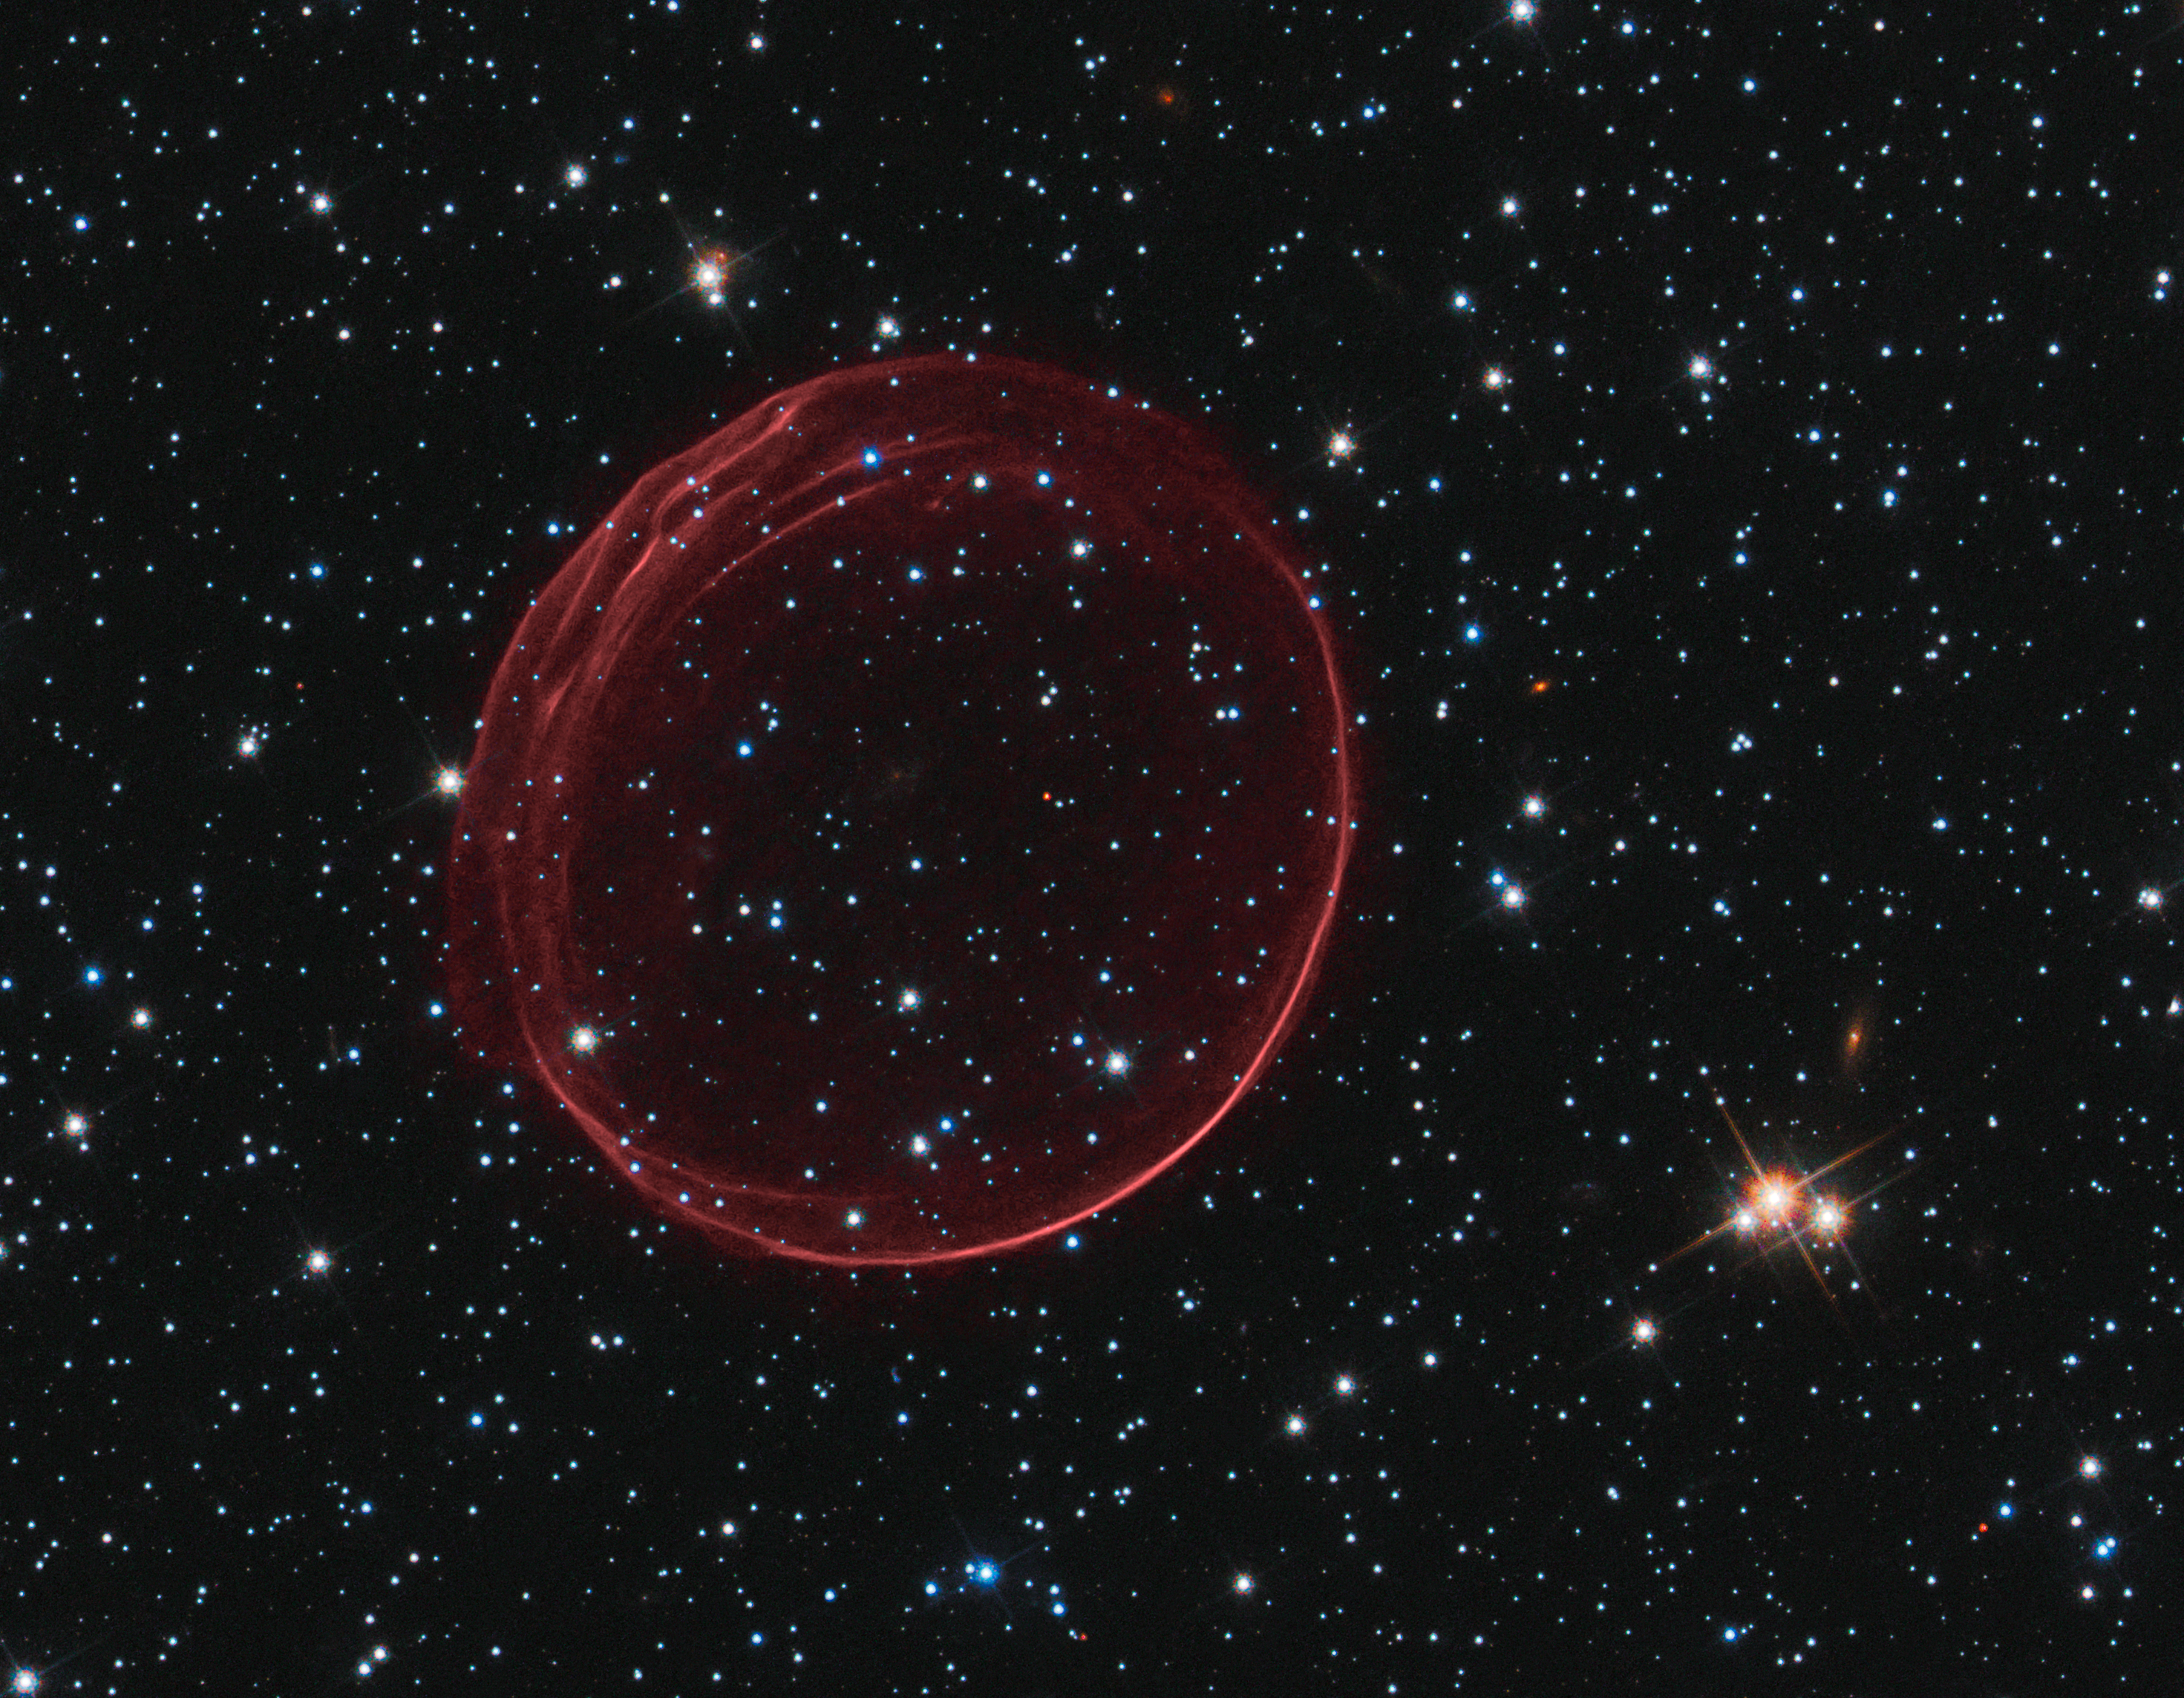

Hubble spots a celestial bauble

This delicate shell, photographed by the NASA/ESA Hubble Space Telescope, appears to float serenely in the depths of space, but this apparent calm hides an inner turmoil. The gaseous envelope formed as the expanding blast wave and ejected material from a supernova tore through the nearby interstellar medium. Called SNR B0509-67.5 (or SNR 0509 for short), the bubble is the visible remnant of a powerful stellar explosion in the Large Magellanic Cloud (LMC), a small galaxy about 160 000 light-years from Earth. Ripples in the shell’s surface may be caused either by subtle variations in the density of the ambient interstellar gas, or possibly be driven from the interior by fragments from the initial explosion. The bubble-shaped shroud of gas is 23 light-years across and is expanding at more than 18 million km/h.

Hubble’s Advanced Camera for Surveys observed the supernova remnant on 28 October 2006 with a filter that isolates light from the glowing hydrogen seen in the expanding shell. These observations were then combined with visible-light images of the surrounding star field that were imaged with Hubble’s Wide Field Camera 3 on 4 November 2010.

Credit: NASA, ESA, and the Hubble Heritage Team (STScI/AURA). Acknowledgement: J. Hughes (Rutgers University)